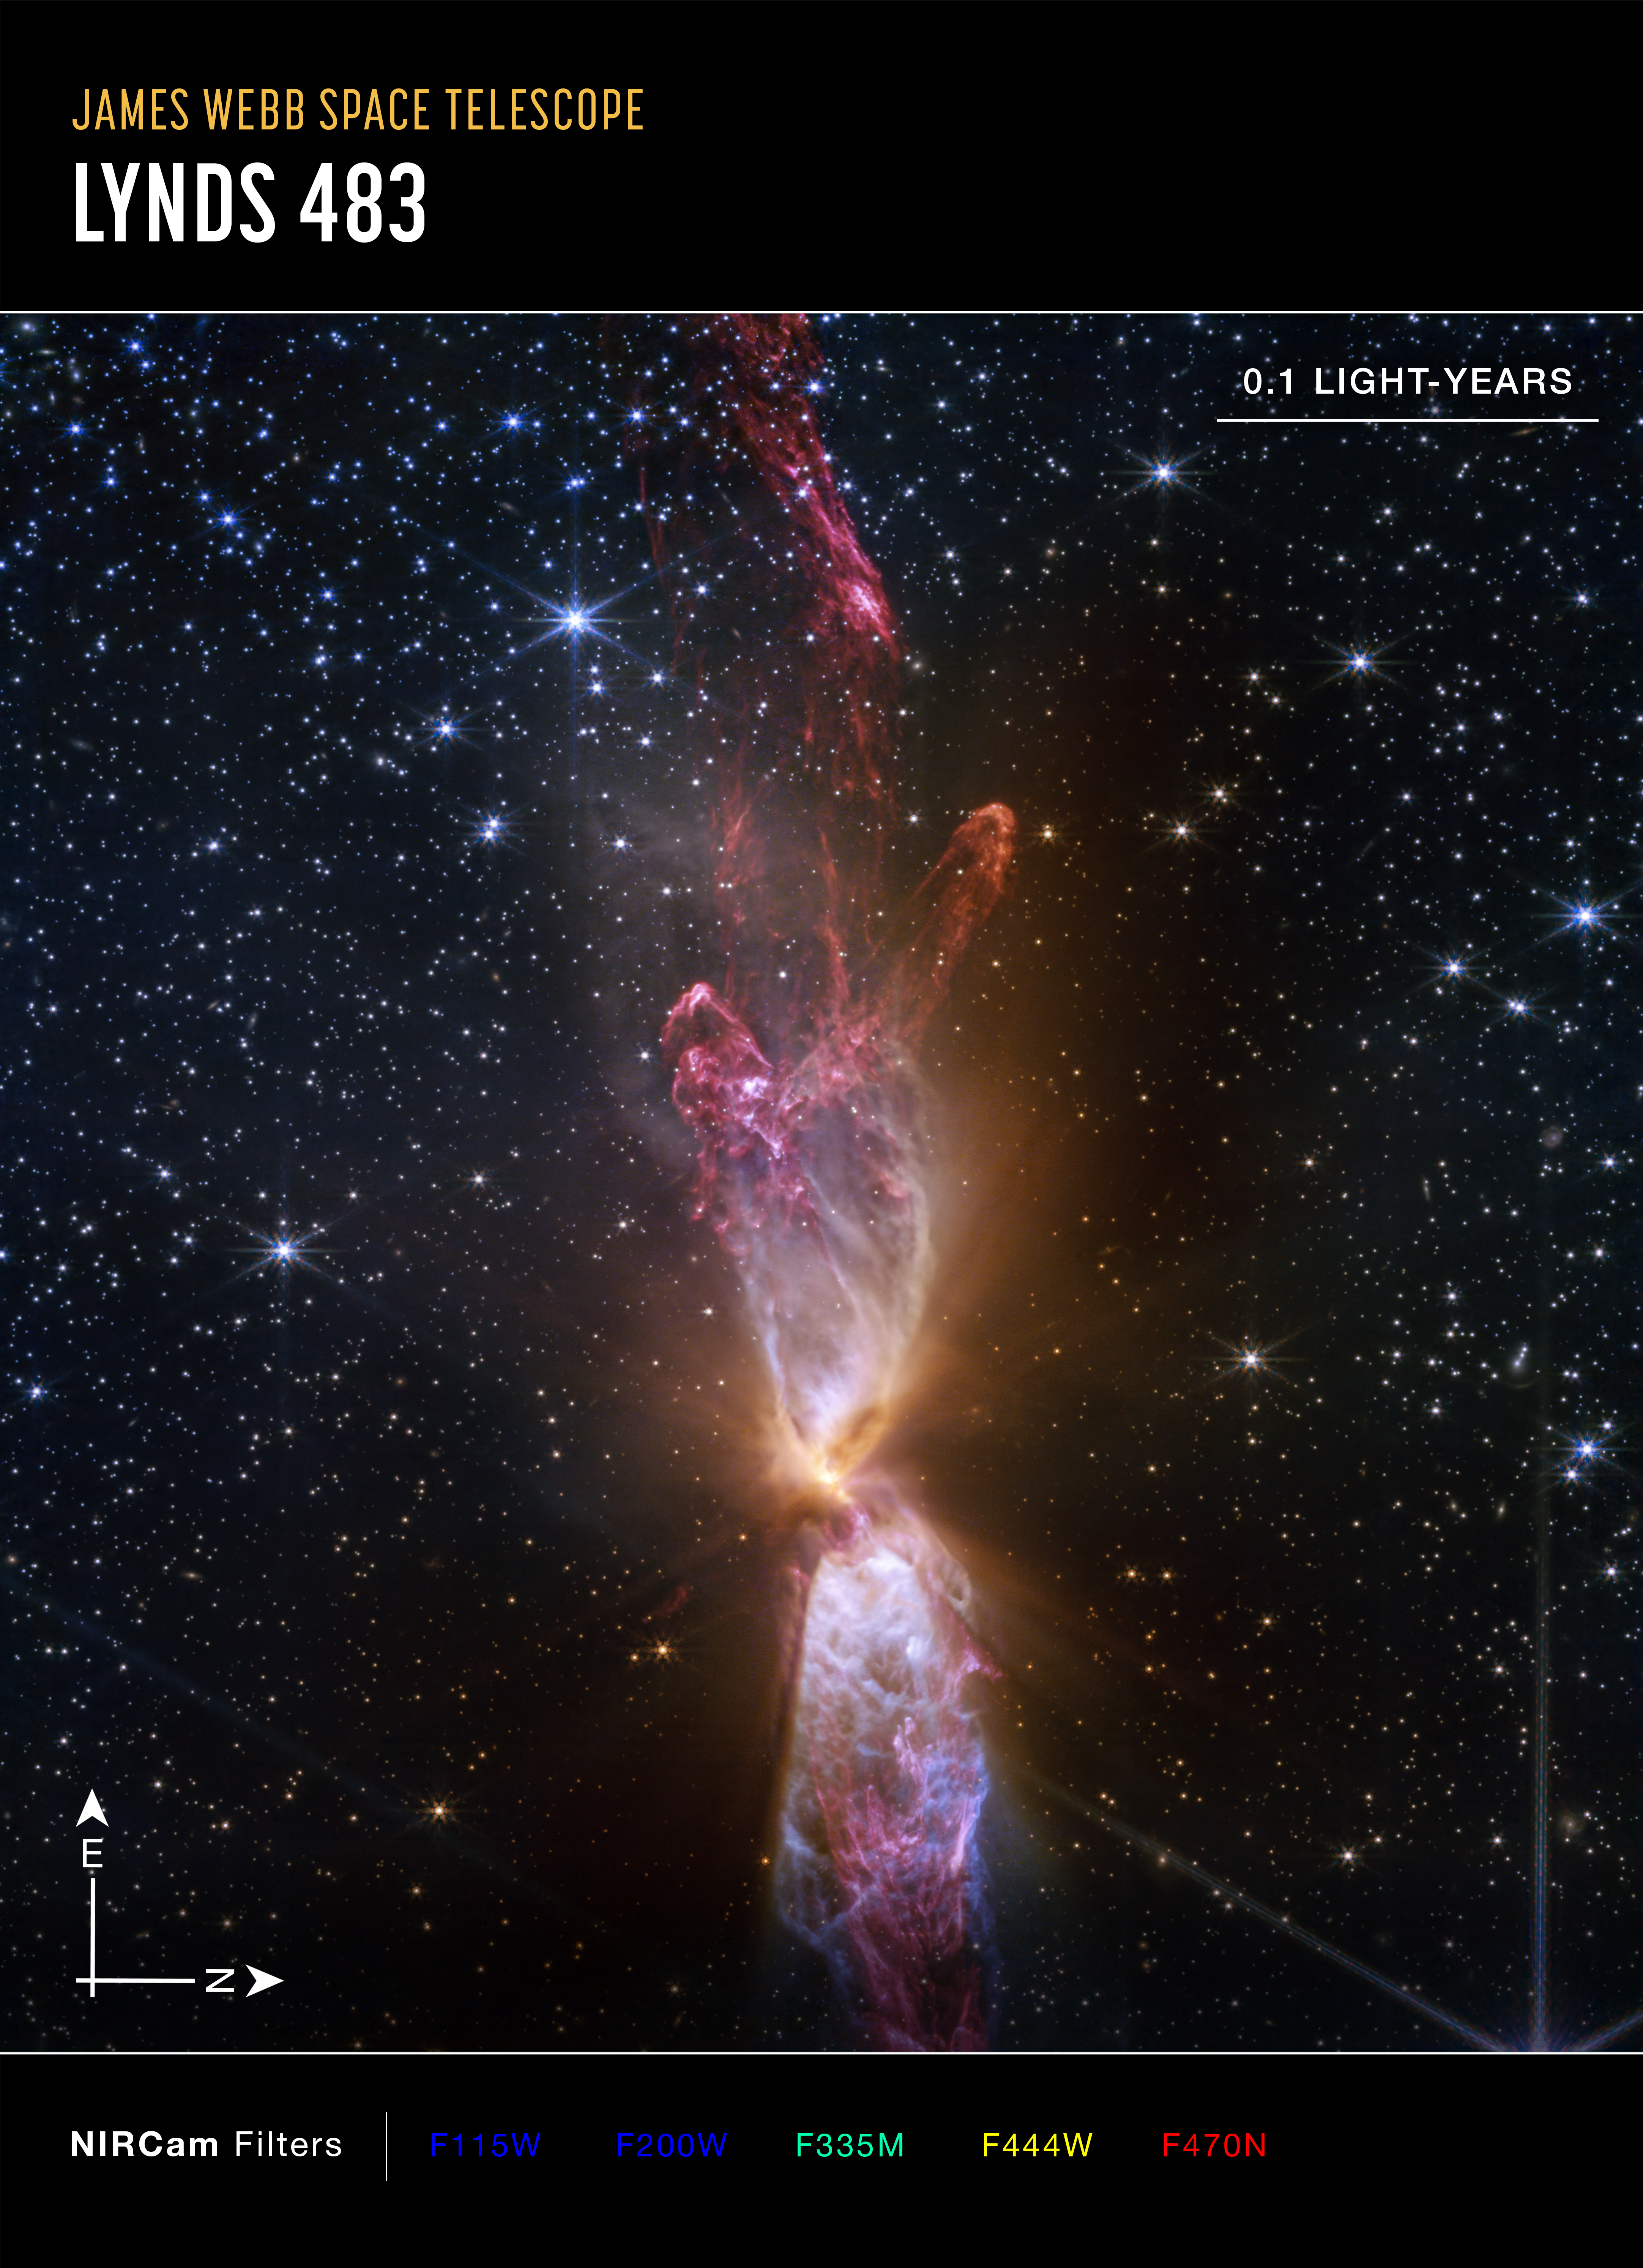

Actively forming star system Lynds 483 (NIRCam image, annotated)

This image of protostar Lynds 483 (L483), captured by the NASA/ESA/CSA James Webb Space Telescope’s NIRCam (Near-Infrared Camera), shows compass arrows, scale bar, and colour key for reference.

The north and east compass arrows show the orientation of the image on the sky. Note that the relationship between north and east on the sky (as seen from below) is flipped relative to direction arrows on a map of the ground (as seen from above).

The scale bar is labelled in light-years, which is the distance that light travels in one Earth-year. (It takes 0.1 years for light to travel a distance equal to the length of the scale bar.) One light-year is equal to 9.46 trillion kilometres.

This image shows invisible near-infrared wavelengths of light that have been translated into visible-light colours. The colour key shows which NIRCam filters were used when collecting the light. The colour of each filter name is the visible light colour used to represent the infrared light that passes through that filter.

Credit: NASA, ESA, CSA, STScI